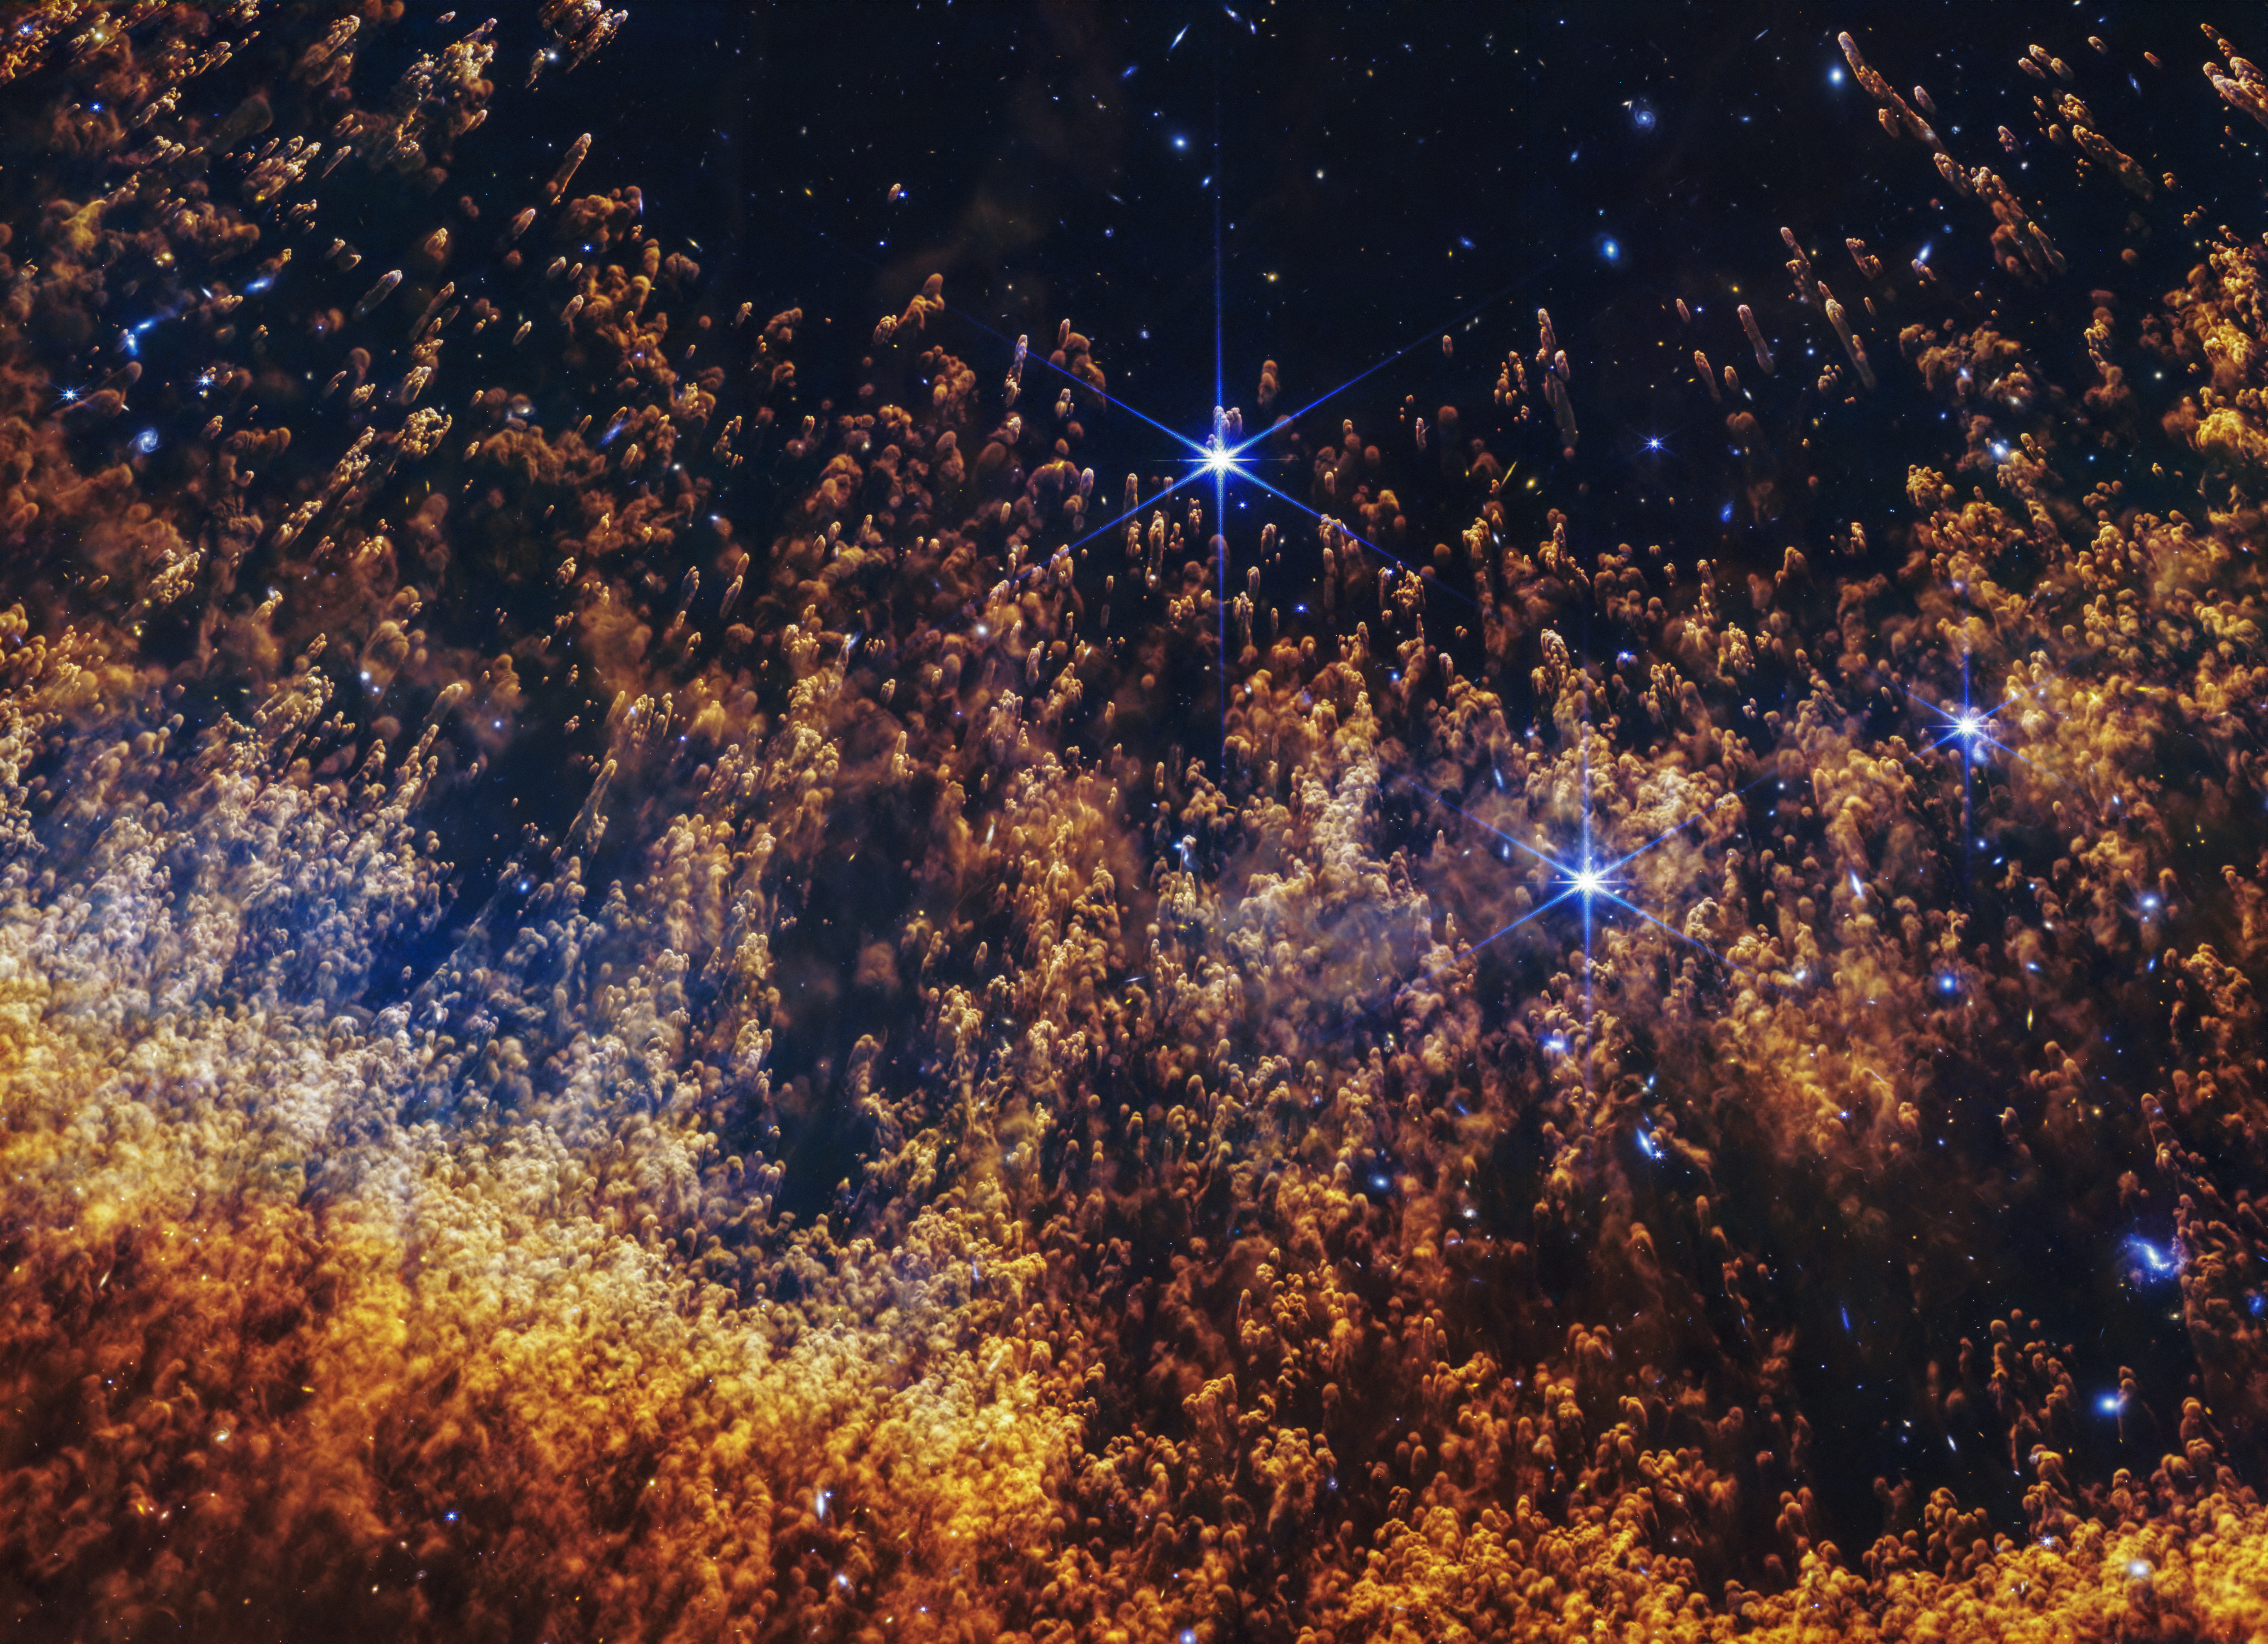

Helix Nebula (NIRCam image)

A new image from the James Webb Space Telescope of a portion of the Helix Nebula highlights comet-like knots, fierce stellar winds, and layers of gas shed off by a dying star interacting with its surrounding environment. Webb’s image also shows the stark transition between the hottest gas to the coolest gas as the shell expands out from the central white dwarf.

Credit: NASA, ESA, CSA, STScI, A. Pagan (STScI)